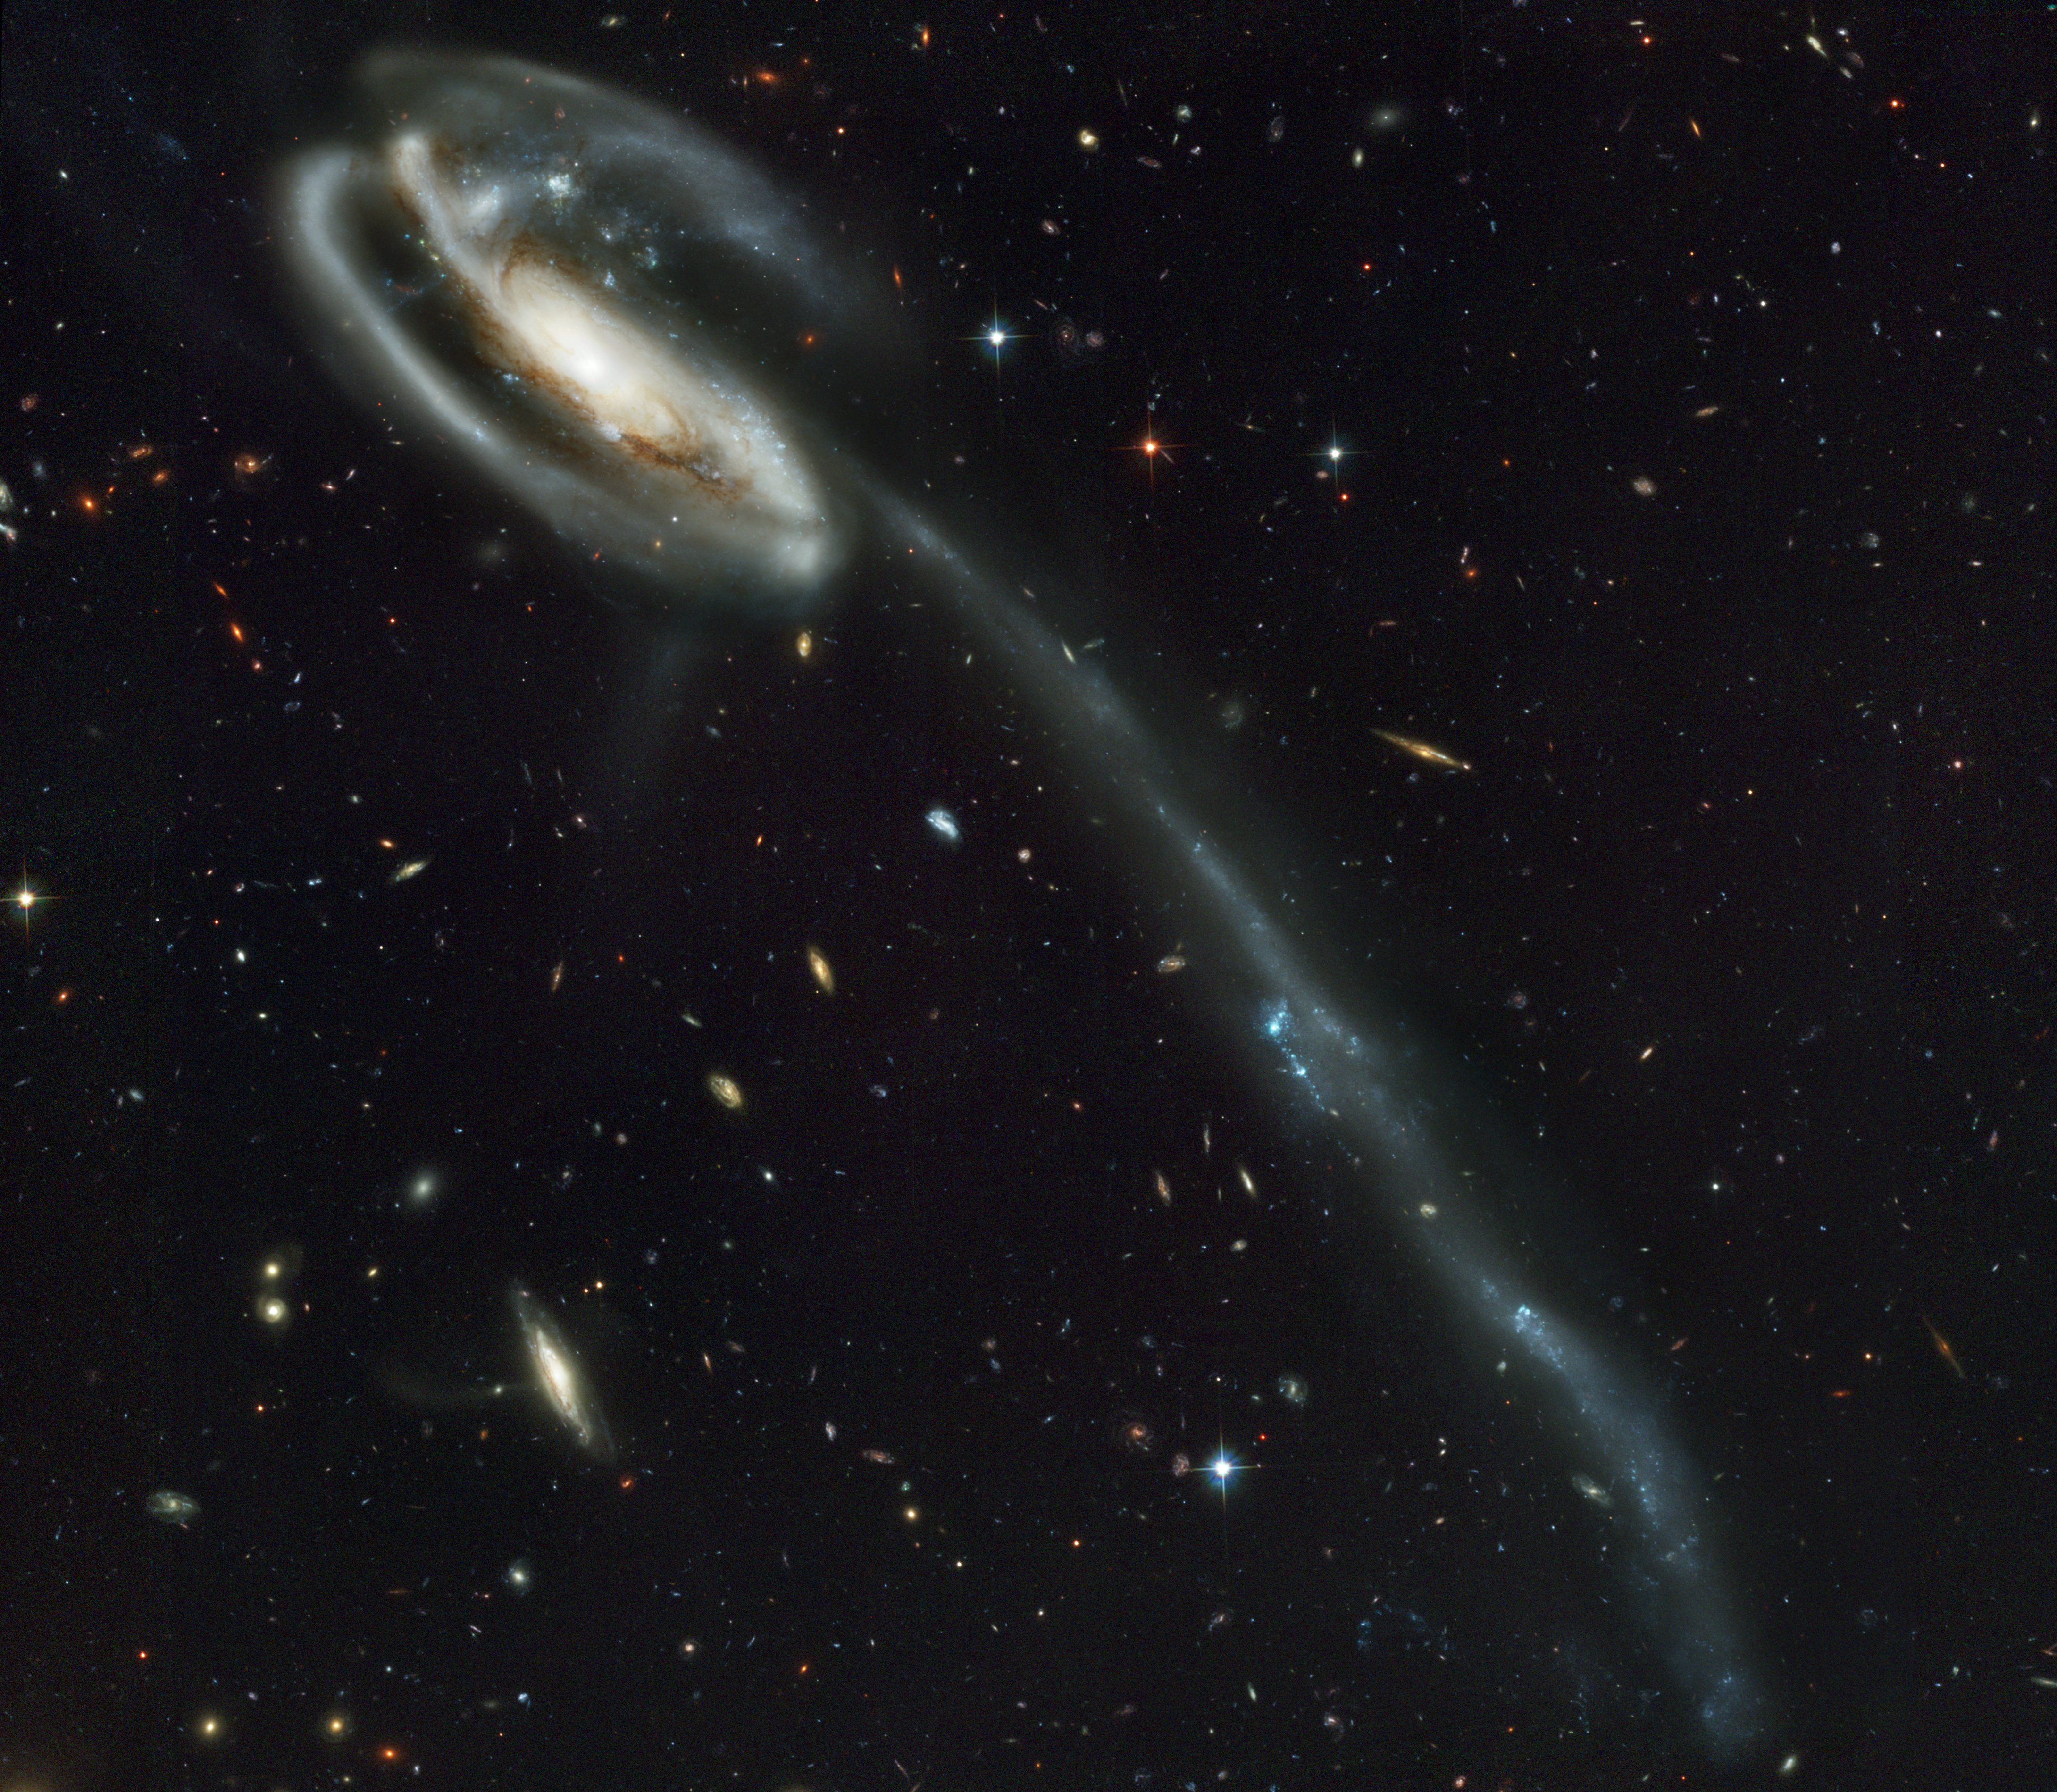

A 'wallpaper' of distant galaxies is a stunning backdrop for a runaway galaxy

Against a stunning backdrop of thousands of galaxies, this odd-looking galaxy with the long streamer of stars appears to be racing through space, like a runaway pinwheel firework.

This picture of the galaxy UGC 10214 was taken by the Advanced Camera for Surveys (ACS), which was installed aboard the NASA/ESA Hubble Space Telescope in March during Servicing Mission 3B. Dubbed the 'Tadpole', this spiral galaxy is unlike the textbook images of stately galaxies. Its distorted shape was caused by a small interloper, a very blue, compact, galaxy visible in the upper left corner of the more massive Tadpole. The Tadpole resides about 420 million light-years away in the constellation Draco.

Seen shining through the Tadpole's disc, the tiny intruder is likely a hit and run galaxy that is now leaving the scene of the accident. Strong gravitational forces from the interaction created the long tail of stars and gas stretching out more than 280 000 light-years.

Numerous young blue stars and star clusters, spawned by the galaxy collision, are seen in the spiral arms, as well as in the long 'tidal' tail of stars. Each of these clusters represents the formation of up to about a million stars. Their colour is blue because they contain very massive stars, which are 10 times hotter and 1 million times brighter than our Sun. Once formed, the star clusters become redder with age as the most massive and bluest stars exhaust their fuel and burn out. These clusters will eventually become old globular clusters similar to those found in essentially all halos of galaxies, including our own Milky Way.

Two prominent clumps of young bright blue stars are visible in the tidal tale and separated by a gap. These clumps of stars will likely become dwarf galaxies that orbit in the Tadpole's halo.

Behind the galactic carnage and torrent of star birth is another compelling picture: a 'wallpaper pattern' of about 3000 faint galaxies. These galaxies represent twice the number of those found in the legendary Hubble Deep Field, the orbiting observatory's 'deepest' view of the heavens, taken in 1995 by the Wide Field and Planetary Camera 2.

The galaxies in the ACS picture, like those in the Hubble Deep Field, stretch back to nearly the beginning of time. They are a myriad of shapes and represent fossil samples of the Universe's 13-billion-year evolution.

The ACS picture was taken in one-twelfth the time it took to observe the Hubble Deep Field. In blue light, ACS discovered even fainter objects than those in the 'deep field'.

The camera's vision is so sharp that astronomers can identify distant colliding galaxies, the 'building blocks' of galaxies, an exquisite 'Whitman's Sampler' of normal galaxies, and presumably extremely faraway galaxies.

ACS made this observation on 1 and 9 April 2002. The colour image is constructed from three separate images taken in near-infrared, orange, and blue filters.

Image credit: NASA, the ACS Science Team (H. Ford, G. Illingworth, M. Clampin, G. Hartig, T. Allen, K. Anderson, F. Bartko, N. Benitez, J. Blakeslee, R. Bouwens, T. Broadhurst, R. Brown, C. Burrows, D. Campbell, E. Cheng, N. Cross, P. Feldman, M. Franx, D. Golimowski, C. Gronwall, R. Kimble, J. Krist, M. Lesser, D. Magee, A. Martel, W. J. McCann, G. Meurer, G. Miley, M. Postman, P. Rosati, M. Sirianni, W. Sparks, P. Sullivan, H. Tran, Z. Tsvetanov, R. White, and R. Woodruff) and ESA

Credit: NASA, Holland Ford (JHU), the ACS Science Team and ESA